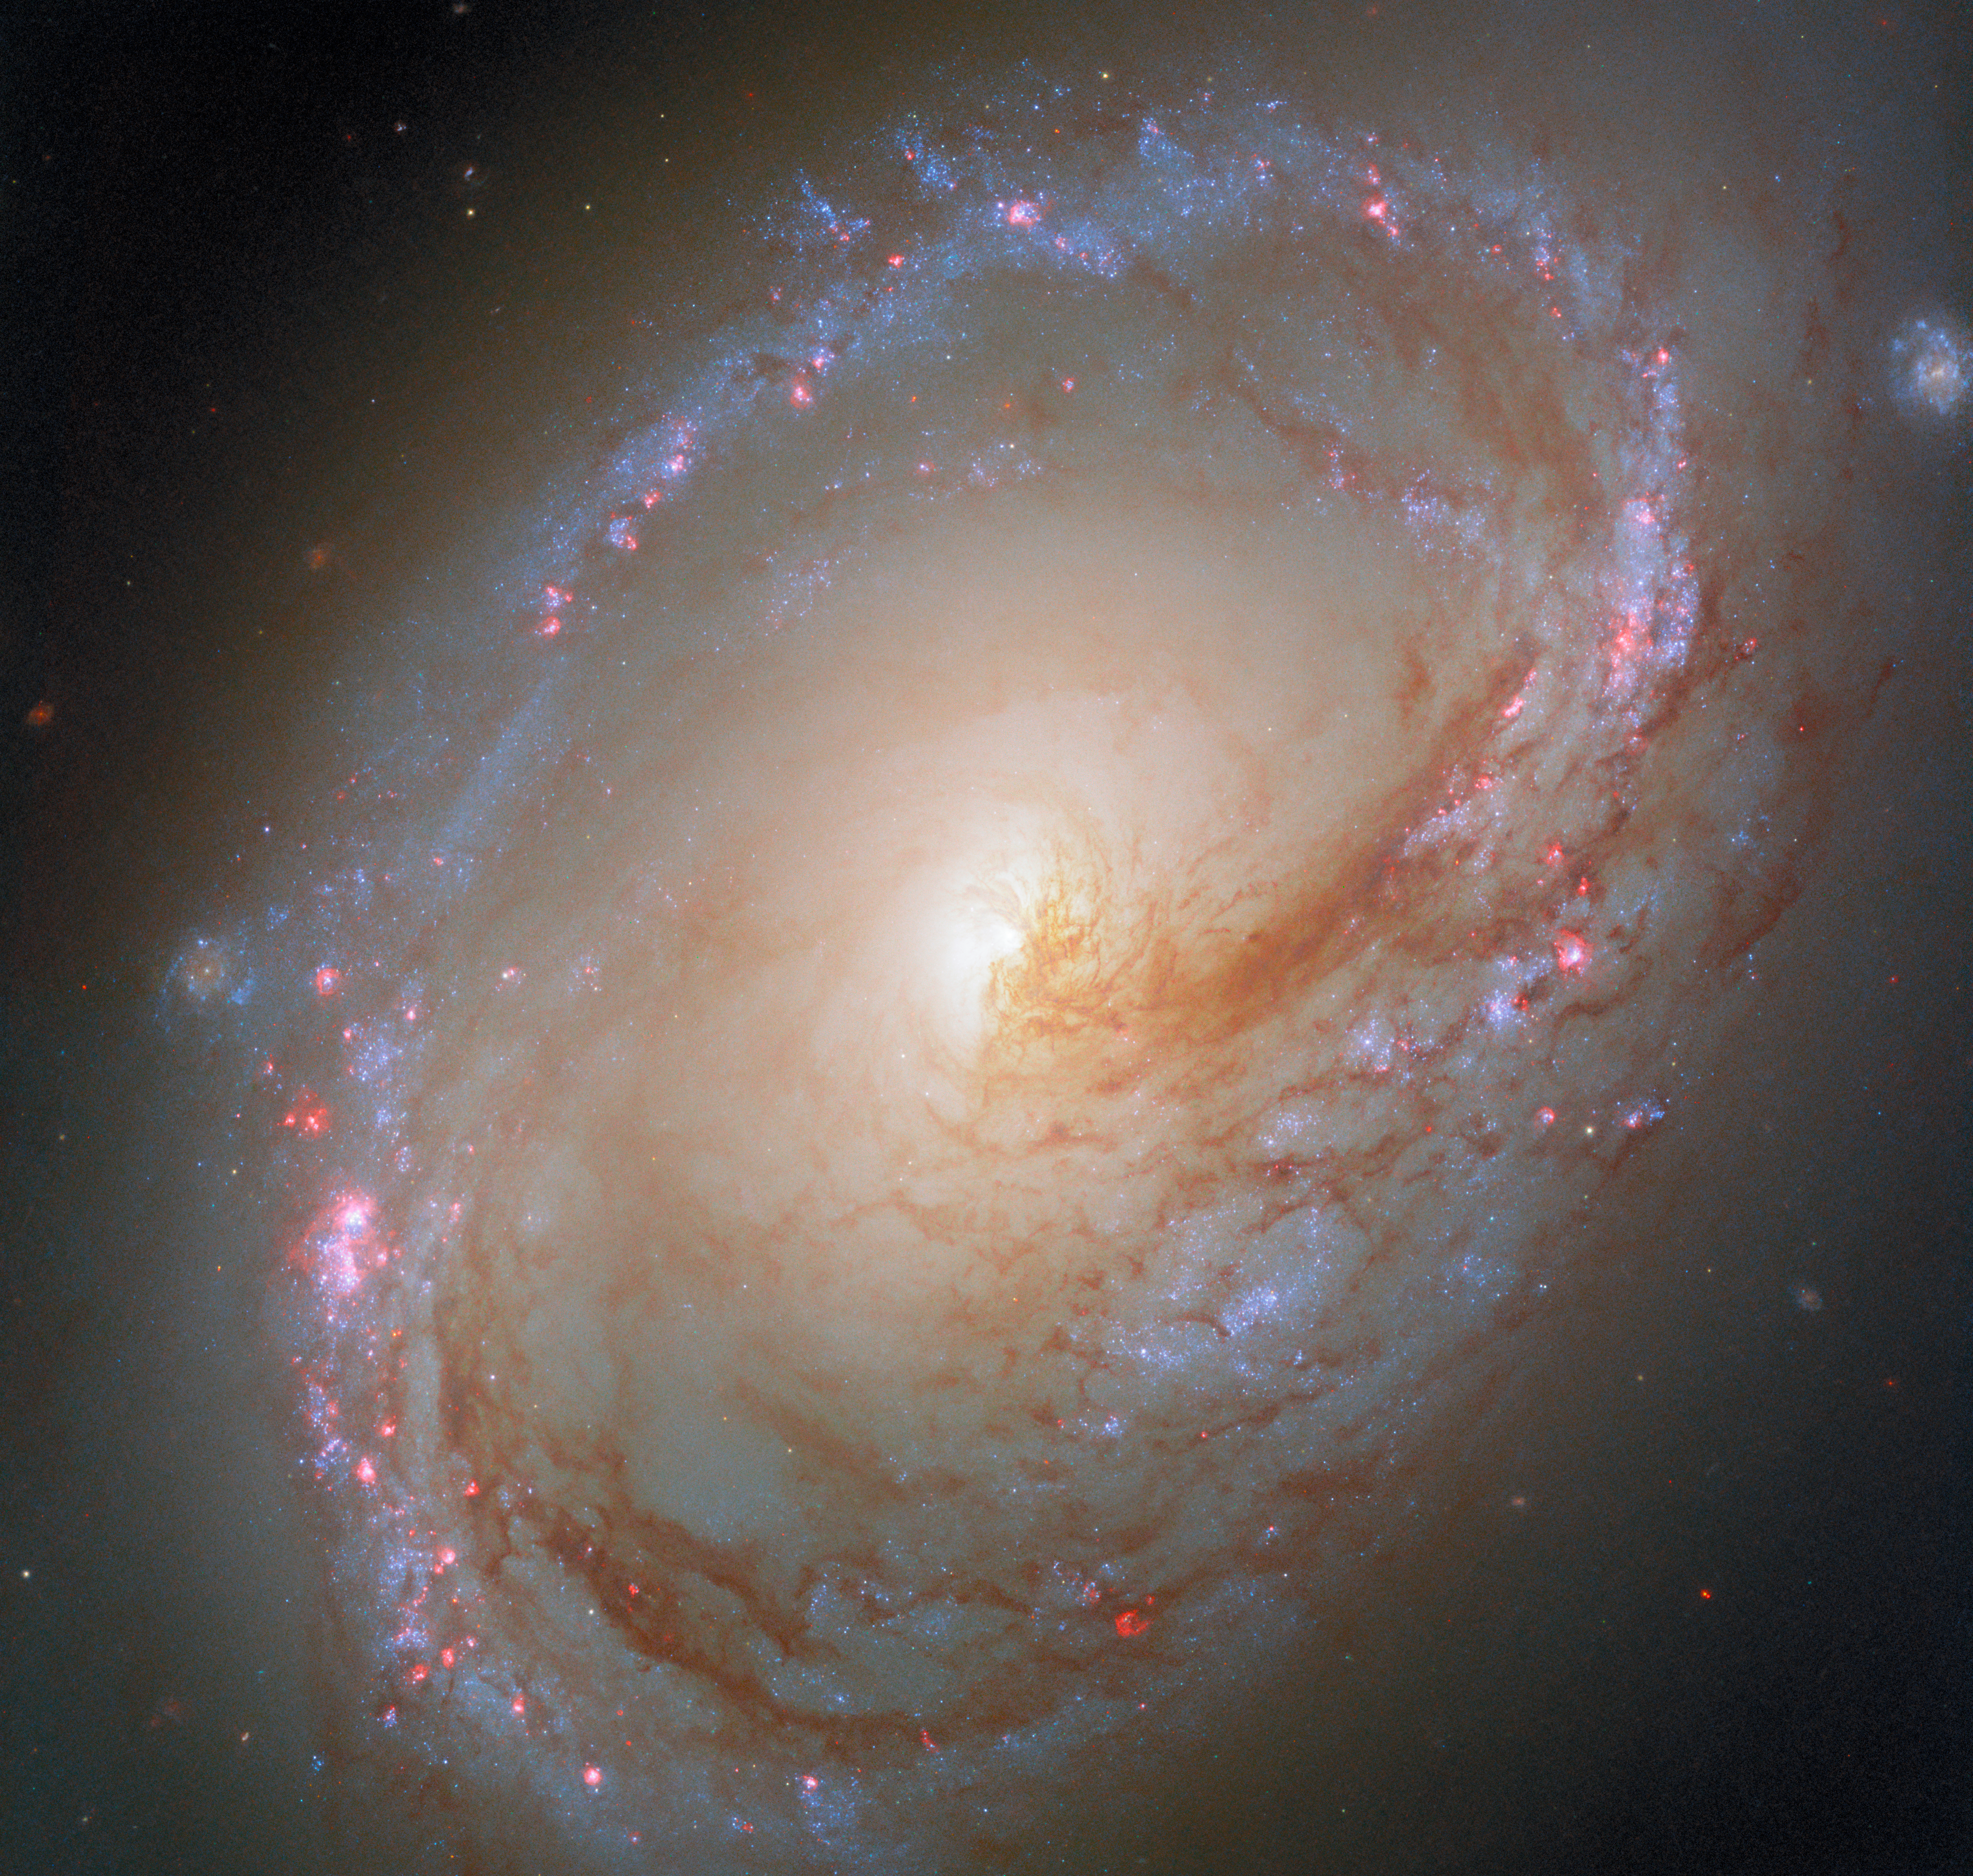

Taking a third look

Today’s NASA/ESA Hubble Space Telescope Picture of the Week features a galaxy whose asymmetric appearance may be the result of a galactic tug of war. Located 35 million light-years away in the constellation Leo, the spiral galaxy Messier 96 is the brightest of the galaxies in its group. The gravitational pull of its galactic neighbours may be responsible for Messier 96’s uneven distribution of gas and dust, asymmetric spiral arms, and off-centre galactic core.

This asymmetric appearance is on full display in a new Hubble image, which incorporates observations made in ultraviolet and optical light. Hubble images of Messier 96 have been released previously in 2015 and 2018. Each successive image has added new data, building up a beautiful and scientifically valuable view of the galaxy.

This third version gives an entirely new perspective on Messier 96’s star formation. The bubbles of pink gas in this image surround hot, young, massive stars, illuminating a ring of star formation in the outskirts of the galaxy. These young stars are still embedded within the clouds of gas from which they were born. The new data included for the first time in this image will be used to study how stars are born within giant dusty gas clouds, how dust filters starlight, and how stars affect their environments.

Credit: ESA/Hubble & NASA, F. Belfiore, D. Calzetti